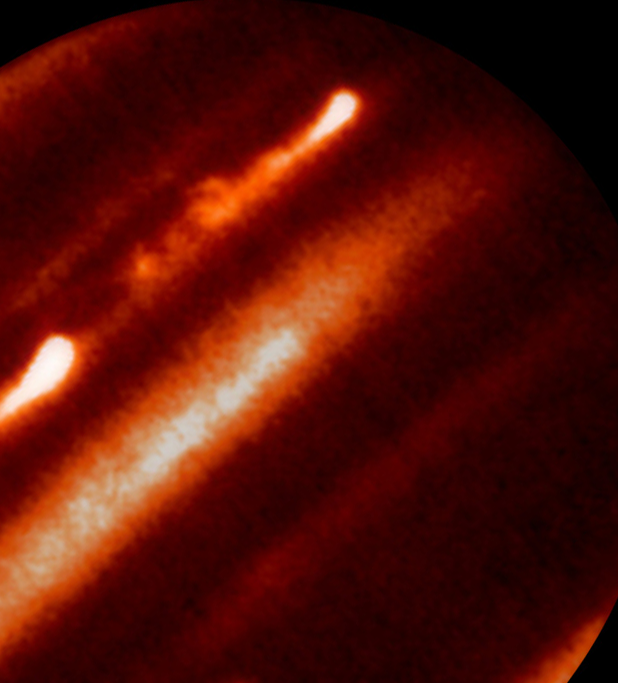

Infrared-Light Image of Jupiter — Infrared Telescope Facility (IRTF)

An image of Jupiter in infrared-light from NASA's Infrared Telescope Facility (IRTF) on April 5, 2007.

Credit: NASA/ESA, IRTF, and A. Sÿnchez-Lavega and R. Hueso (Universidad del País Vasco, Spain)